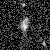

Galaxies: snapshots in time

Single images from the Galaxies: Snapshots in Time collage.

Credit: NASA & ESA